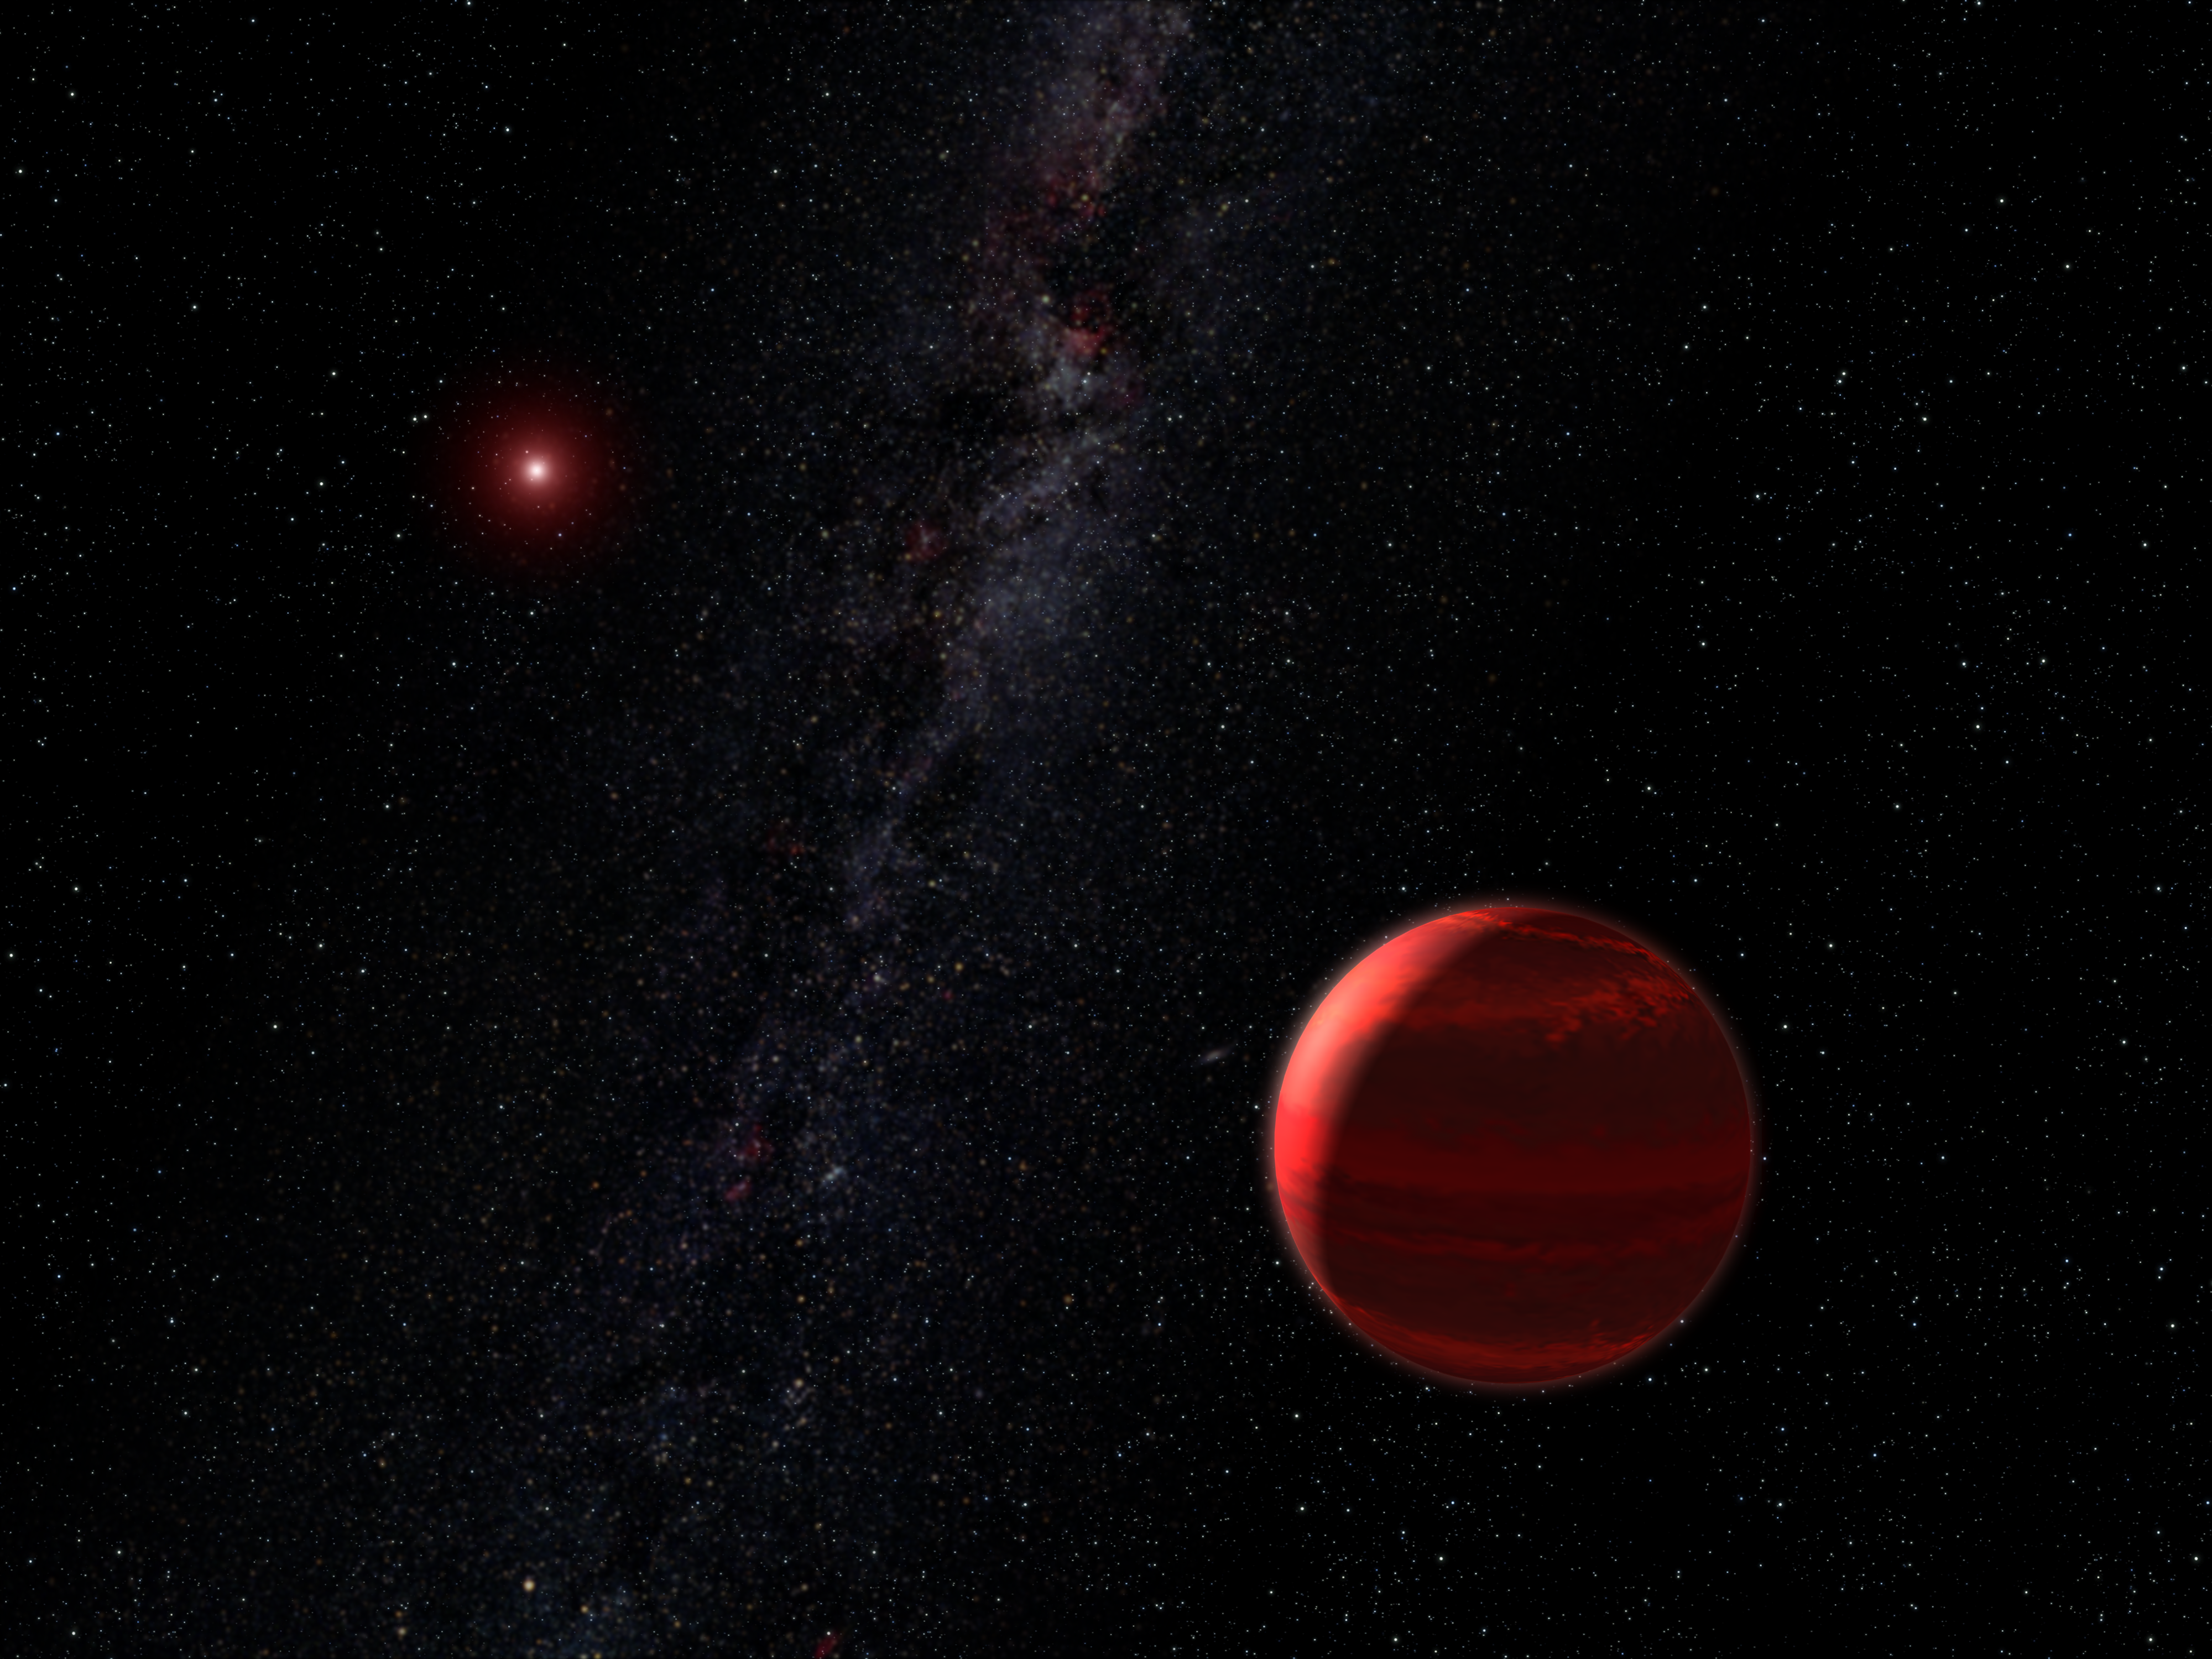

Red dwarf star CHXR 73 A and companion object (artist's concept)

This is an artist's concept of the red dwarf star CHRX 73 (upper left) and its companion CHRX 73 B in the foreground (lower right) weighing in at 12 Jupiter masses. CHRX 73 B is one of the smallest companion objects ever seen around a normal star beyond our Sun.

Estimated to be 12 times the mass of Jupiter, the object is small enough to be a planet, but also large enough to be a brown dwarf, a failed star. The NASA/ESA Hubble Space Telescope discovery of this diminutive companion to a low-mass star is a dramatic reminder that astronomers do not have a consensus in deciding which objects orbiting other stars are truly planets.

The brown dwarf orbits 30 billion kilometres from its star (roughly 200 times farther than Earth is from the Sun). The youthful, 2-million-year-old star is one-third the mass of our Sun and lies approximately 500 light-years away in the Chamaeleon I star-forming region in our Galaxy.

Credit: NASA, ESA and G. Bacon (STScI)